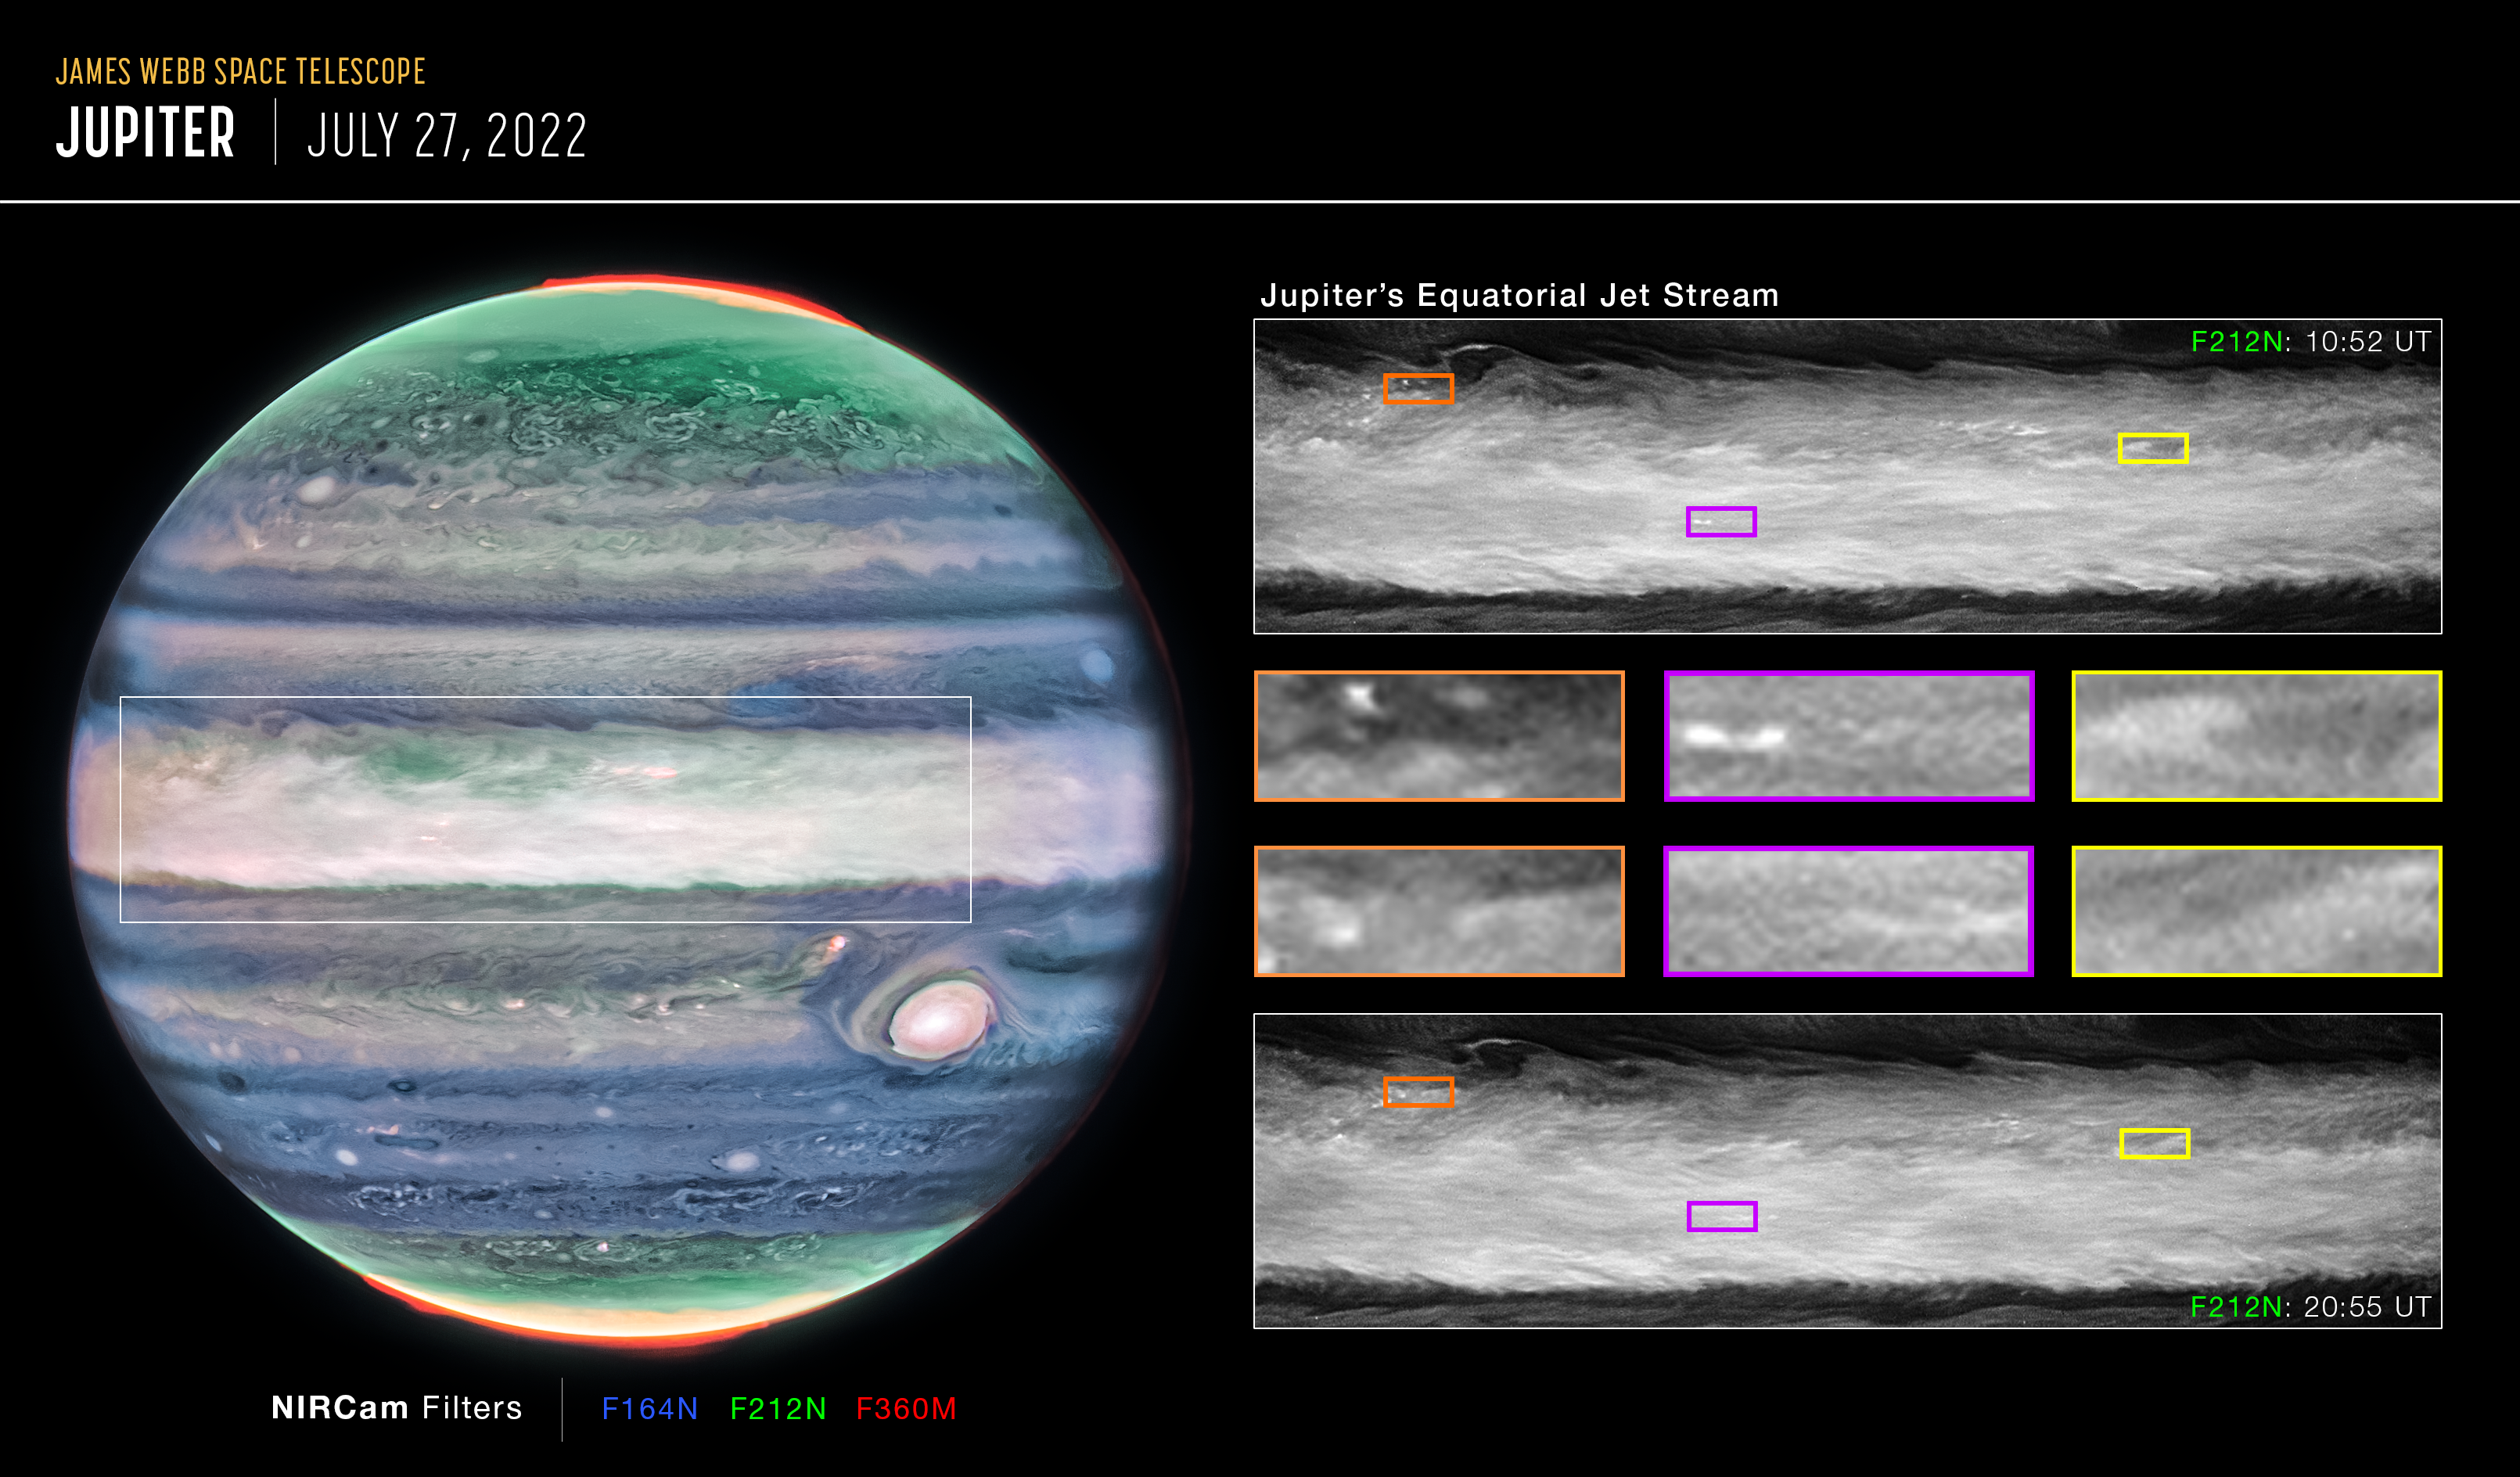

Jupiter jet pullouts

Researchers using the NASA/ESA/CSA James Webb Space Telescope’s NIRCam (Near-Infrared Camera) have discovered a high-speed jet stream sitting over Jupiter’s equator, above the main cloud decks. At a wavelength of 2.12 microns, which observes between altitudes of about 20-35 kilometers above Jupiter’s cloud tops, researchers spotted several wind shears, or areas where wind speeds change with height or with distance, which enabled them to track the jet. This image highlights several of the features around Jupiter’s equatorial zone that, between one rotation of the planet (10 hours), are very clearly disturbed by the motion of the jet stream.

The discovery of this jet is giving insights into how the layers of Jupiter’s famously turbulent atmosphere interact with each other, and how Webb is uniquely capable of tracking those features. Researchers are looking forward to additional observations of Jupiter with Webb to determine if the jet’s speed and altitude change over time.

These results were recently published in Nature Astronomy.

These findings may help inform ESA’s Jupiter Icy Moons Explorer, Juice, which was launched on 14 April 2023. Juice will make detailed observations of the giant gas planet and its three large ocean-bearing moons — Ganymede, Callisto and Europa — with a suite of remote sensing, geophysical and in situ instruments. The mission will characterise these moons as both planetary objects and possible habitats, explore Jupiter’s complex environment in depth, and study the wider Jupiter system as an archetype for gas giants across the Universe.

Credit: NASA, ESA, CSA, STScI, R. Hueso (University of the Basque Country), I. de Pater (University of California, Berkeley), T. Fouchet (Observatory of Paris), L. Fletcher (University of Leicester), M. Wong (University of California, Berkeley), J. DePasquale (STScI)